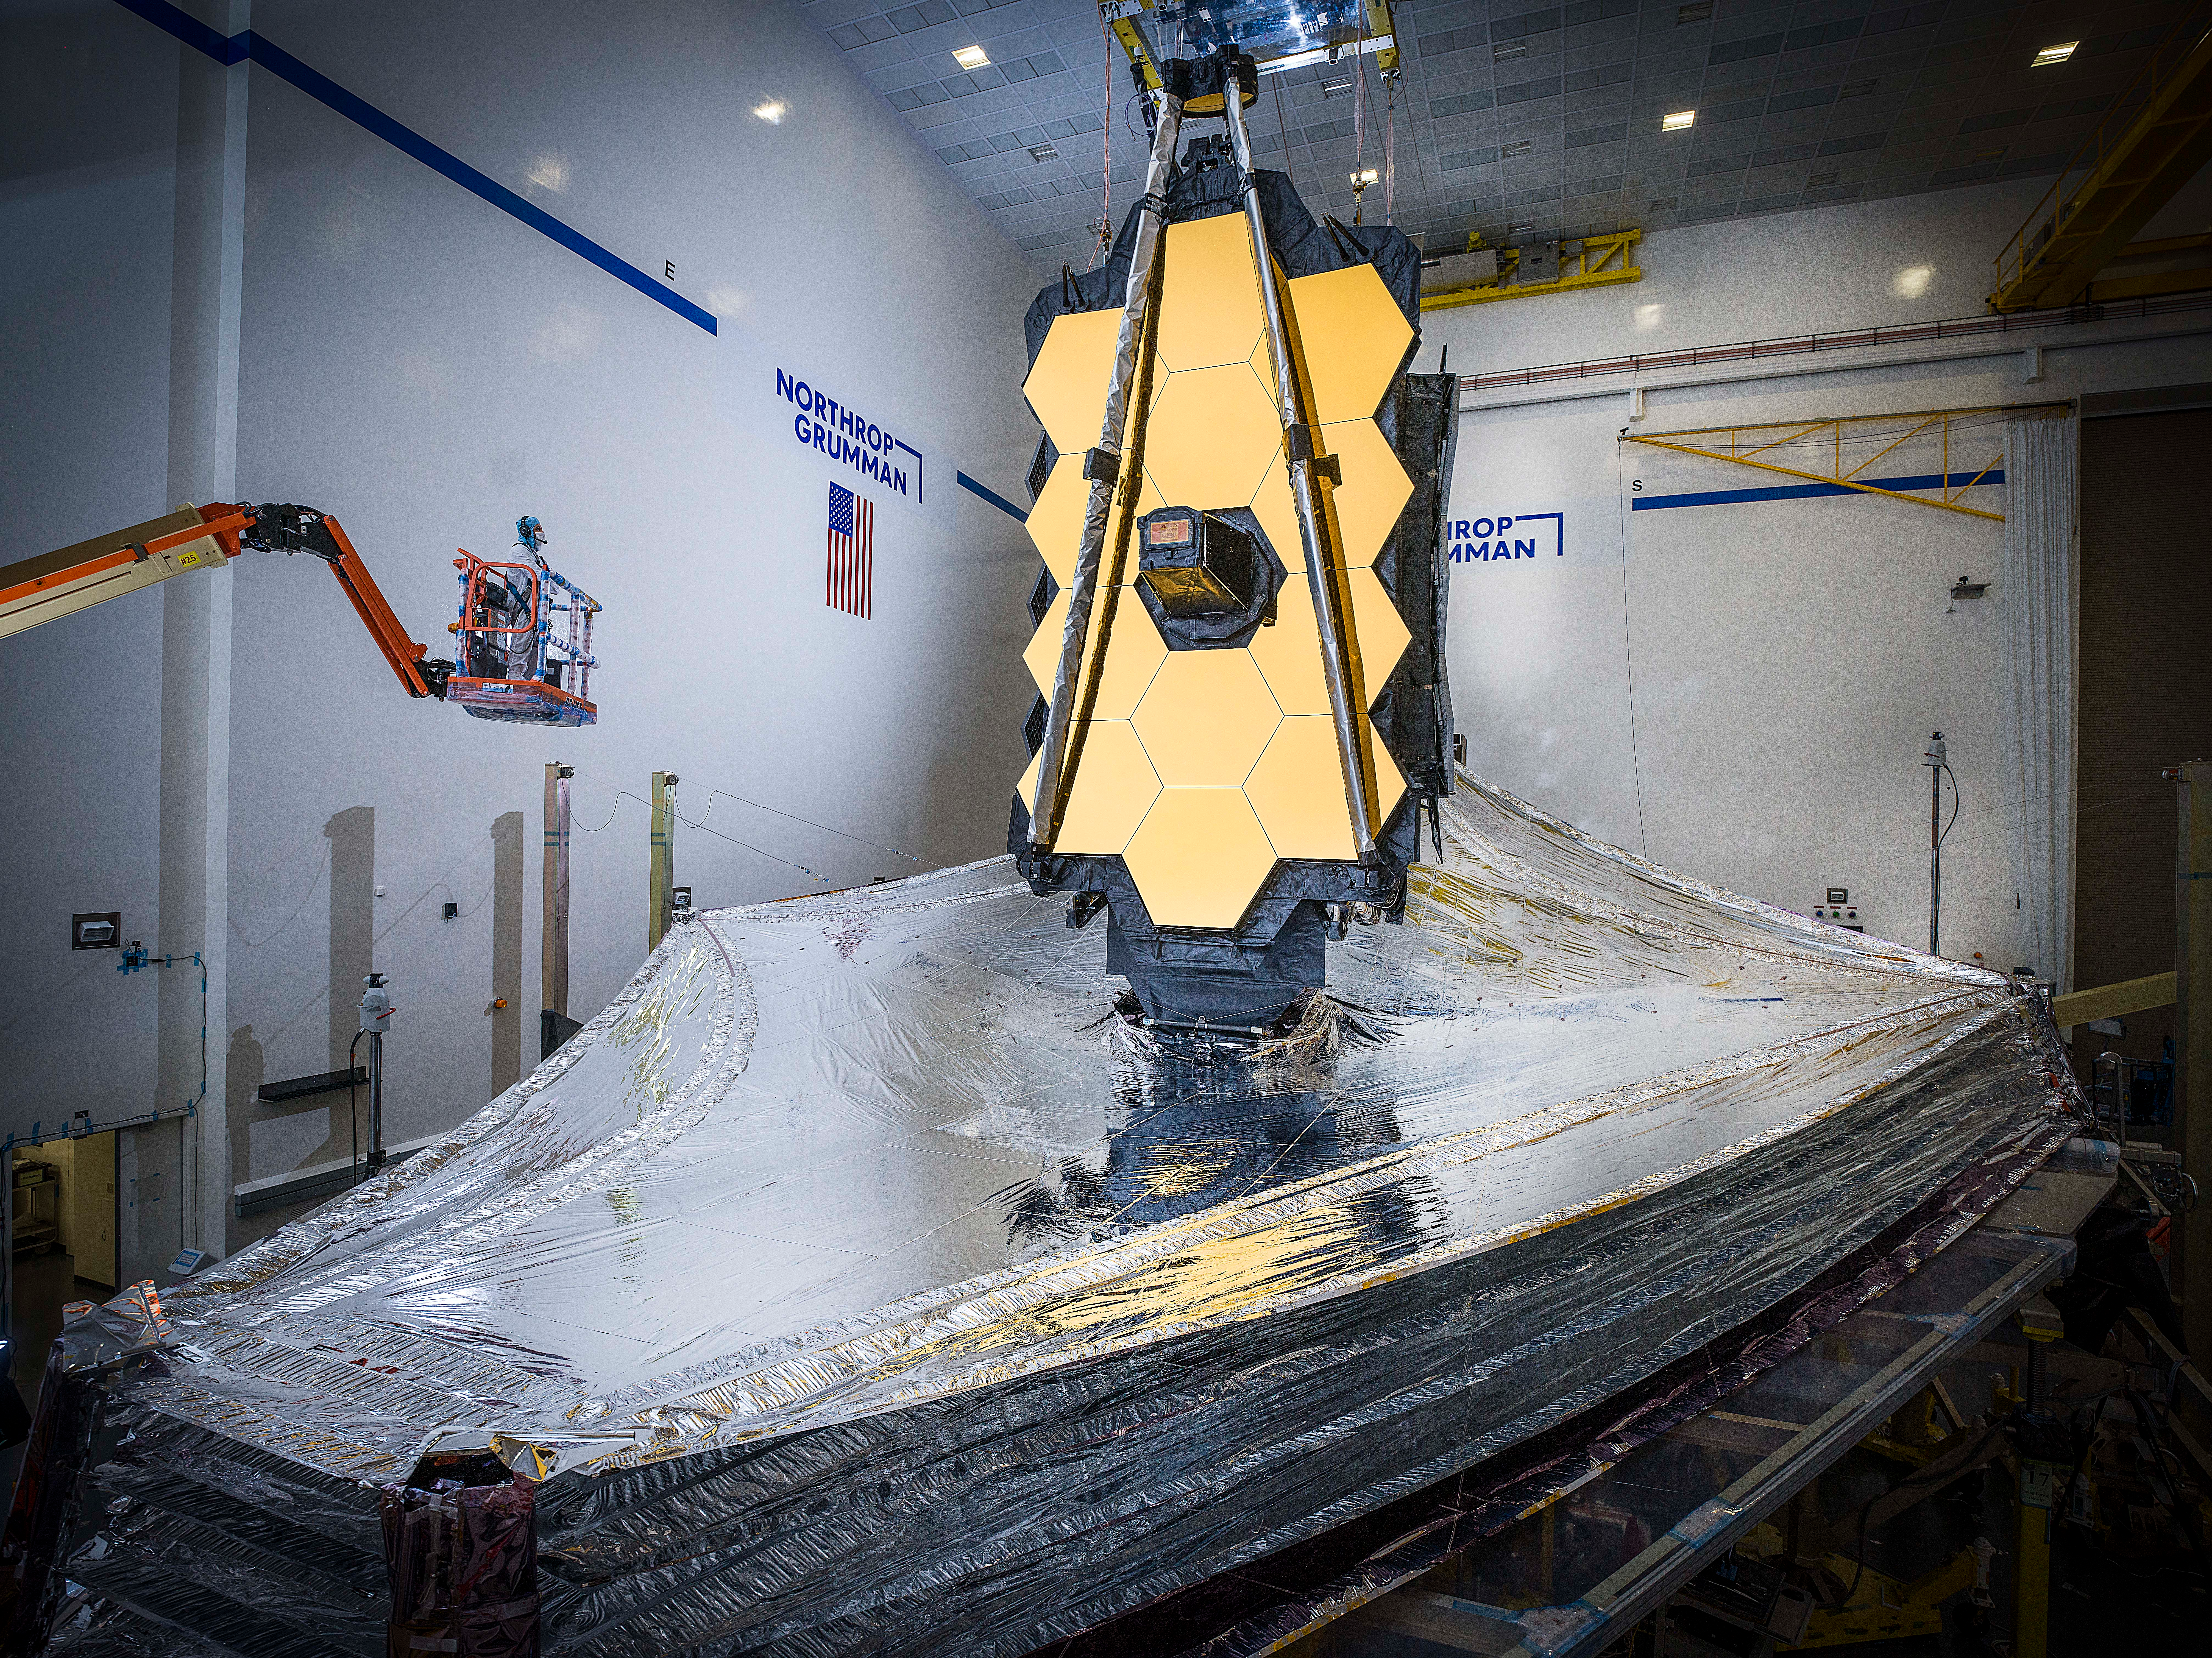

Webb in the Northrop Grumman cleanroom

With the conclusion of the year just days away, we are excited to announce #NASAWebb has cleared one of its most important testing milestones to date. Webb’s 5-layer sunshield has been successfully deployed and tensioned into the same configuration it will have once in space!

Read more here: go.nasa.gov/2KAESkU

Webb is now in its final series of deployment and checkout tests before the observatory is packed for shipment to French Guiana for launch aboard an @ArianeGroup Ariane V rocket. These tests will verify that Webb will deploy perfectly in space after its launch.

Credit: NASA/Chris Gunn